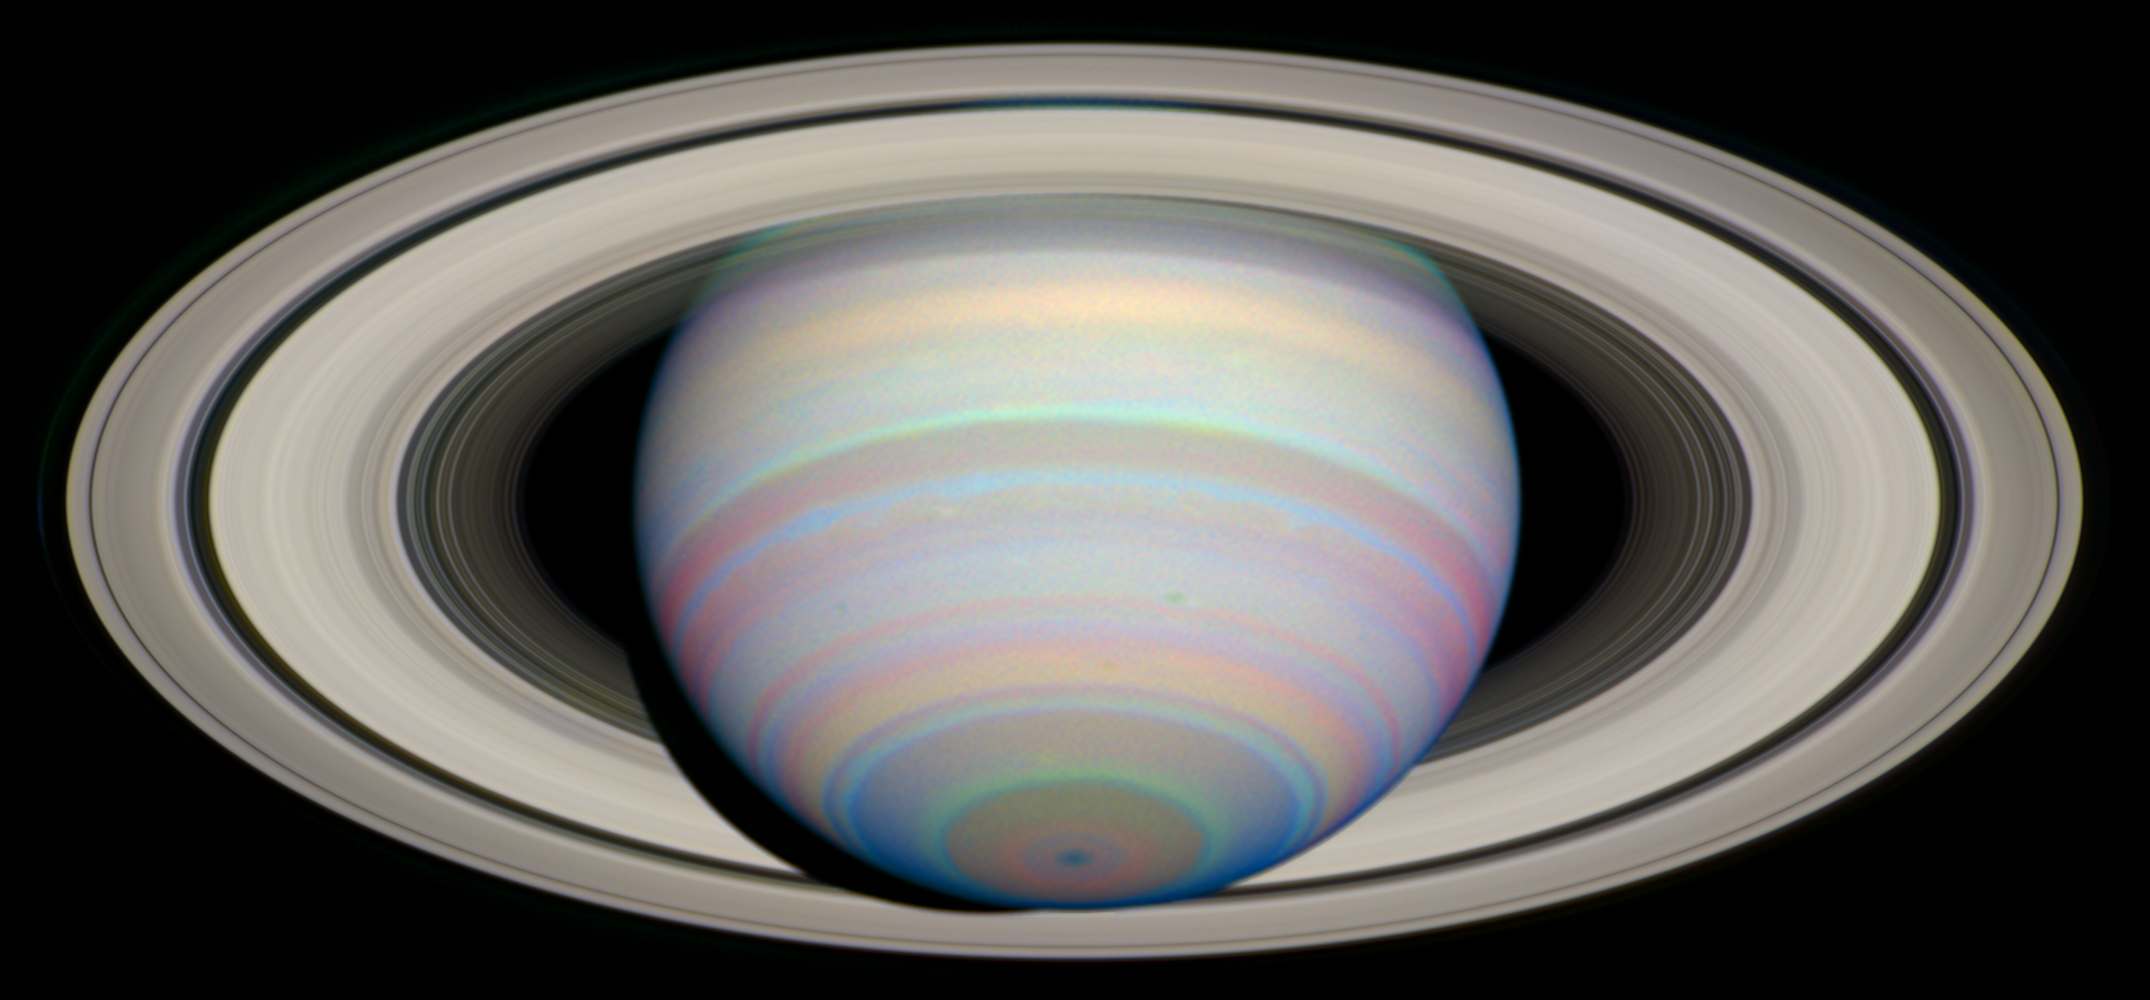

The Slant on Saturn's Rings (Infrared)

This image from NASA's Hubble Space Telescope shows Saturn's Southern Hemisphere and the southern face of its rings in Infrared light.

Saturn experiences seasonal tilts away from and toward the Sun, much the same way Earth does, over the course of its 29.5-year orbit. This means that approximately every 30 years, we can catch Saturn with its rings at their maximum tilt of 27 degrees toward Earth and get the best glimpse of Saturn's South Pole and the southern side of the planet's rings.

Credit: NASA/ESA and E. Karkoschka (University of Arizona)